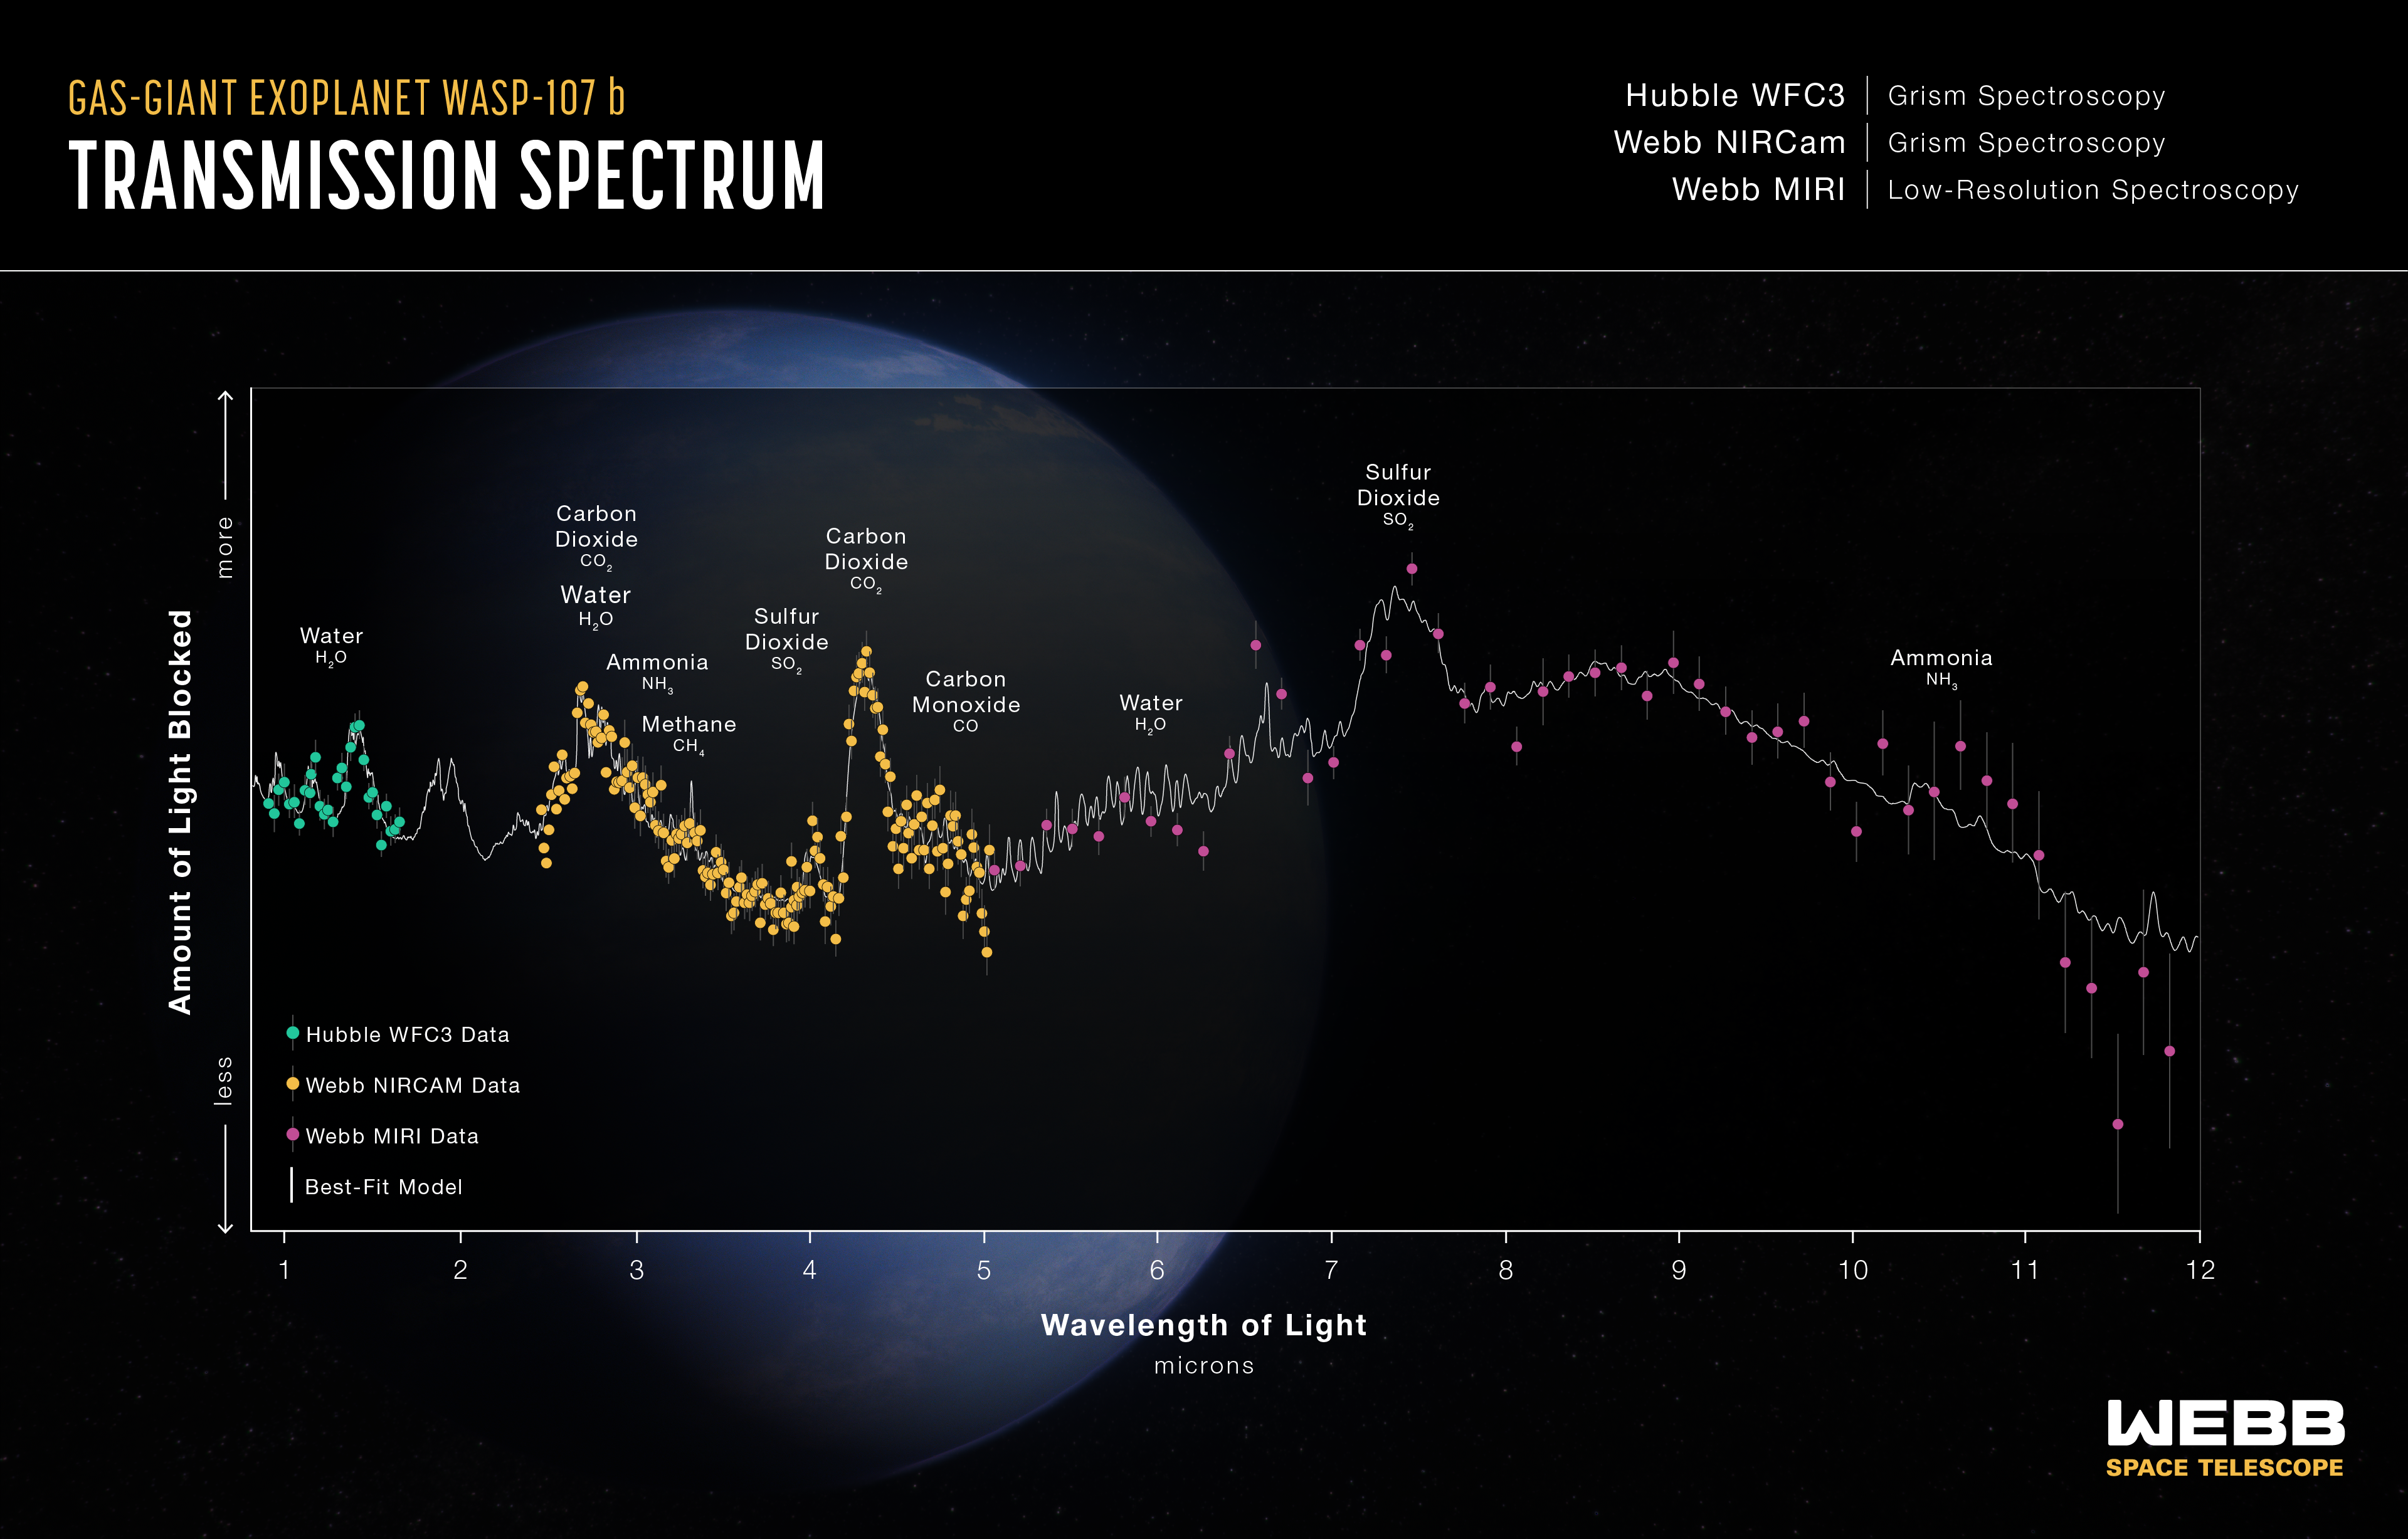

Transmission Spectrum — WASP-107 b (Hubble WFC3, Webb NIRCam, and Webb MIRI)

This transmission spectrum, captured using the NASA/ESA/CSA Hubble and James Webb space telescopes, shows the amounts of different wavelengths (colours) of starlight blocked by the atmosphere of the gas-giant exoplanet WASP-107 b .

The spectrum includes light collected over four separate observations using a total of three different instruments: the NASA/ESA Hubble Space Telescope’s WFC3 (0.8–1.6 microns), Webb’s NIRCam (2.4–4.0 microns and 3.9–5.0 microns), and Webb’s MIRI (5–12 microns). Each set of measurements was made by observing the planet–star system for about 10 hours before, during, and after the transit as the planet moved across the face of the star.

By comparing the brightness of light filtered through the planet’s atmosphere (transmitted light) to unfiltered starlight, it is possible to calculate the amount of each wavelength that is blocked by the atmosphere. Since each molecule absorbs a unique combination of wavelengths, the transmission spectrum can be used to constrain the abundances of various gases.

This spectrum shows clear evidence for water (H2O), carbon dioxide (CO2), carbon monoxide (CO), methane (CH4), sulphur dioxide (SO2), and ammonia (NH3) in the planet’s atmosphere, allowing researchers to estimate its interior temperature and the mass of its core.

This wavelength coverage from optical to mid-infrared is the broadest of any exoplanet transmission spectrum to date, and includes the first reported detection of ammonia in an exoplanet atmosphere.

Credit: NASA, ESA, CSA, R. Crawford (STScI)